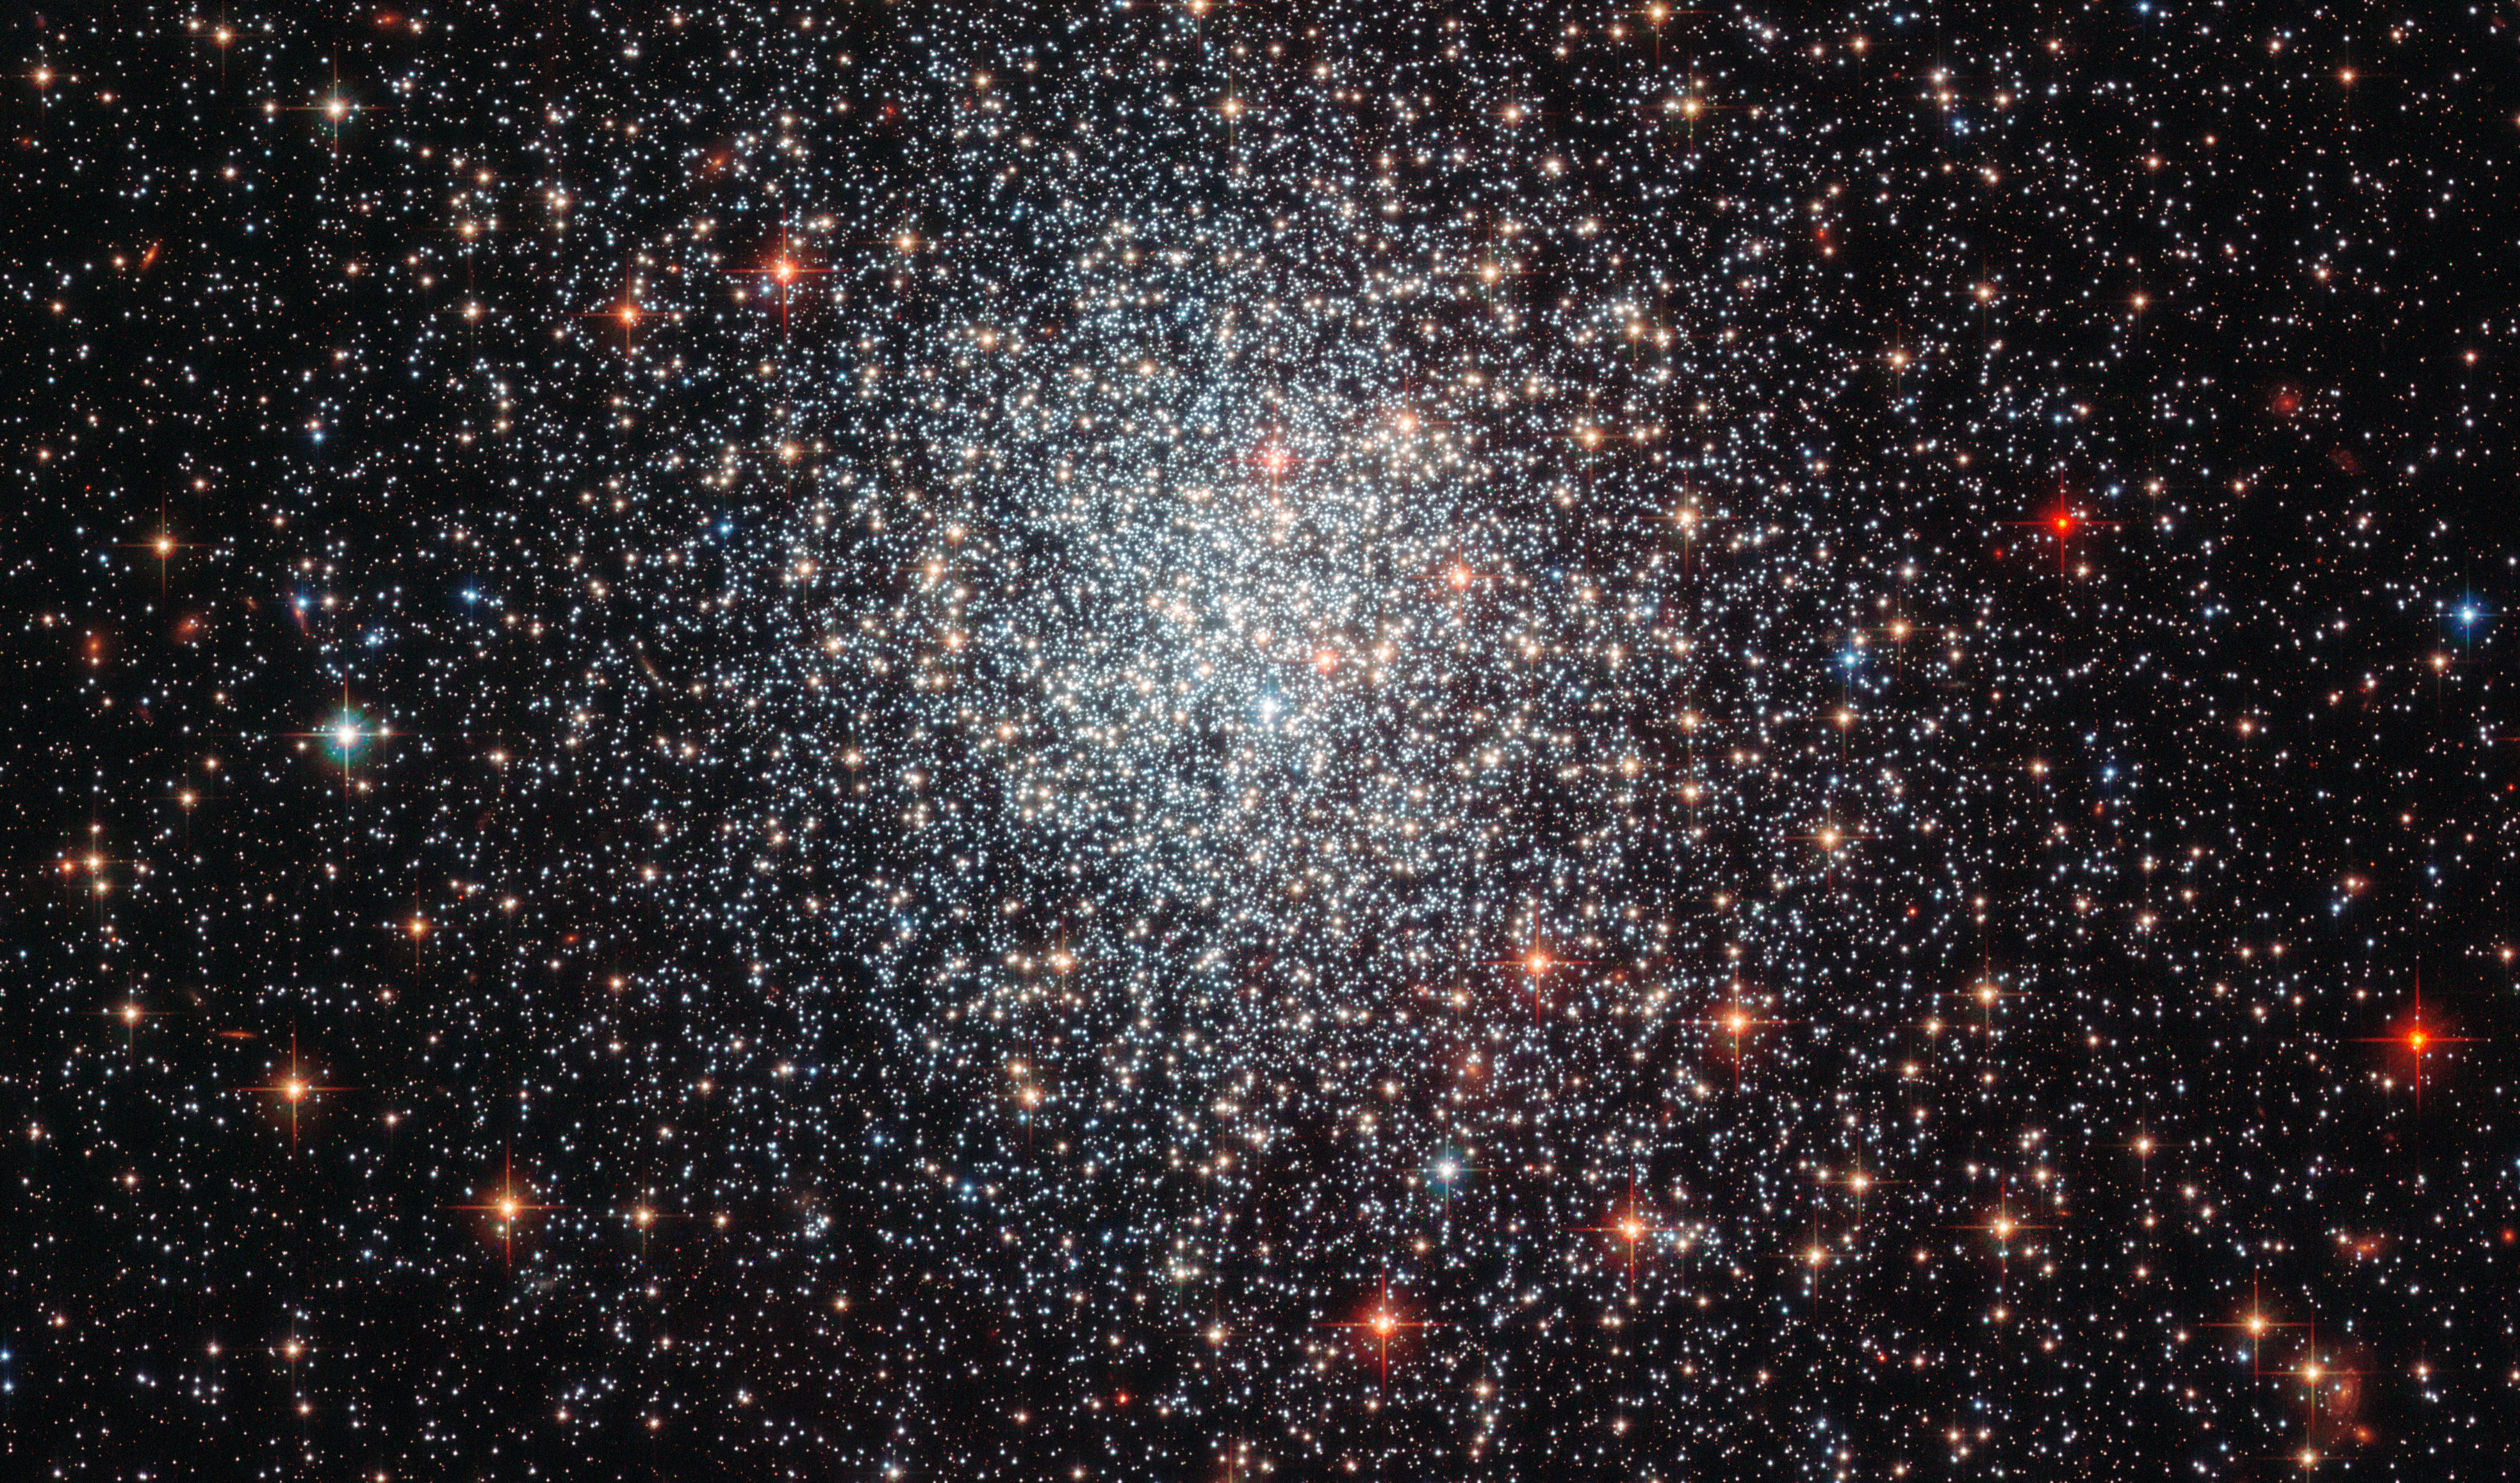

A youthful cluster

Shown here in a new image taken with the Advanced Camera for Surveys (ACS) on board the NASA/ESA Hubble Space Telescope, is the globular cluster NGC 1783. This is one of the biggest globular clusters in the Large Magellanic Cloud, a satellite galaxy of our own galaxy, the Milky Way, in the southern hemisphere constellation of Dorado.

First observed by John Herschel in 1835, NGC 1783 is nearly 160 000 light-years from Earth, and has a mass around 170 000 times that of the Sun.

Globular clusters are dense collections of stars held together by their own gravity, which orbit around galaxies like satellites. The image clearly shows the symmetrical shape of NGC 1783 and the concentration of stars towards the centre, both typical features of globular clusters.

By measuring the colour and brightness of individual stars, astronomers can deduce an overall age for a cluster and a picture of its star formation history. NGC 1783 is thought to be under one and a half billion years old — which is very young for globular clusters, which are typically several billion years old. During that time, it is thought to have undergone at least two periods of star formation, separated by 50 to 100 million years.

This ebb and flow of star-forming activity is an indicator of how much gas is available for star formation at any one time. When the most massive stars created in the first burst of formation explode as supernovae they blow away the gas needed to form further stars, but the gas reservoir can later be replenished by less massive stars which last longer and shed their gas less violently. After this gas flows to the dense central regions of the star cluster, a second phase of star formation can take place and once again the short-lived massive stars blow away any leftover gas. This cycle can continue a few times, at which time the remaining gas reservoir is thought to be too small to form any new stars.

A version of this image was entered into the Hubble's Hidden Treasures image processing competition by contestant Judy Schmidt.

Credit: ESA/Hubble & NASA Acknowledgement: Judy Schmidt (geckzilla.com)